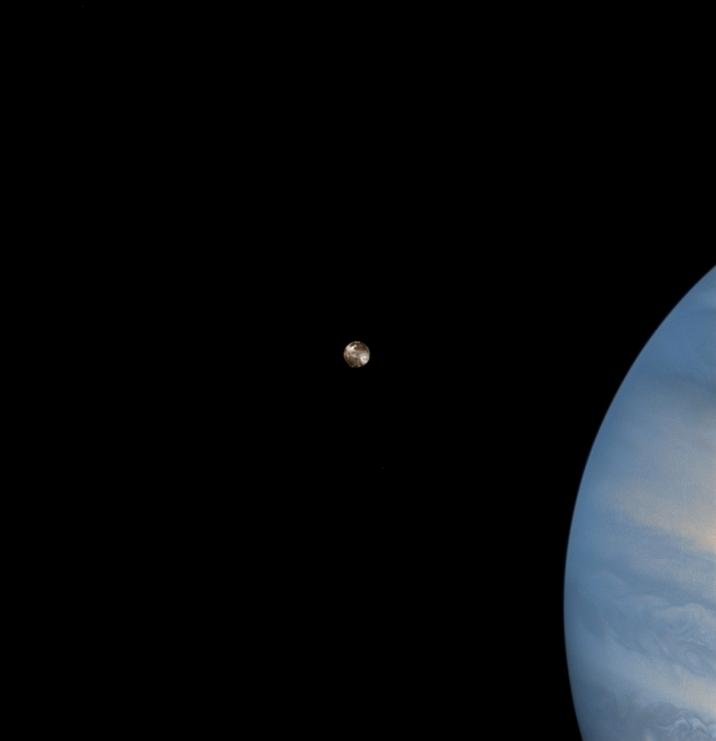

Io Transit of Jupiter

While hunting for volcanic plumes on Io, the NASA/ESA Hubble Space Telescope captured these images of the volatile moon sweeping across the giant face of Jupiter. Only a few weeks before these dramatic images were taken, the orbiting telescope snapped a portrait of one of Io's volcanoes spewing sulfur dioxide 'snow.'

Credit: J. Spencer (Lowell Observatory) and NASA/ESA